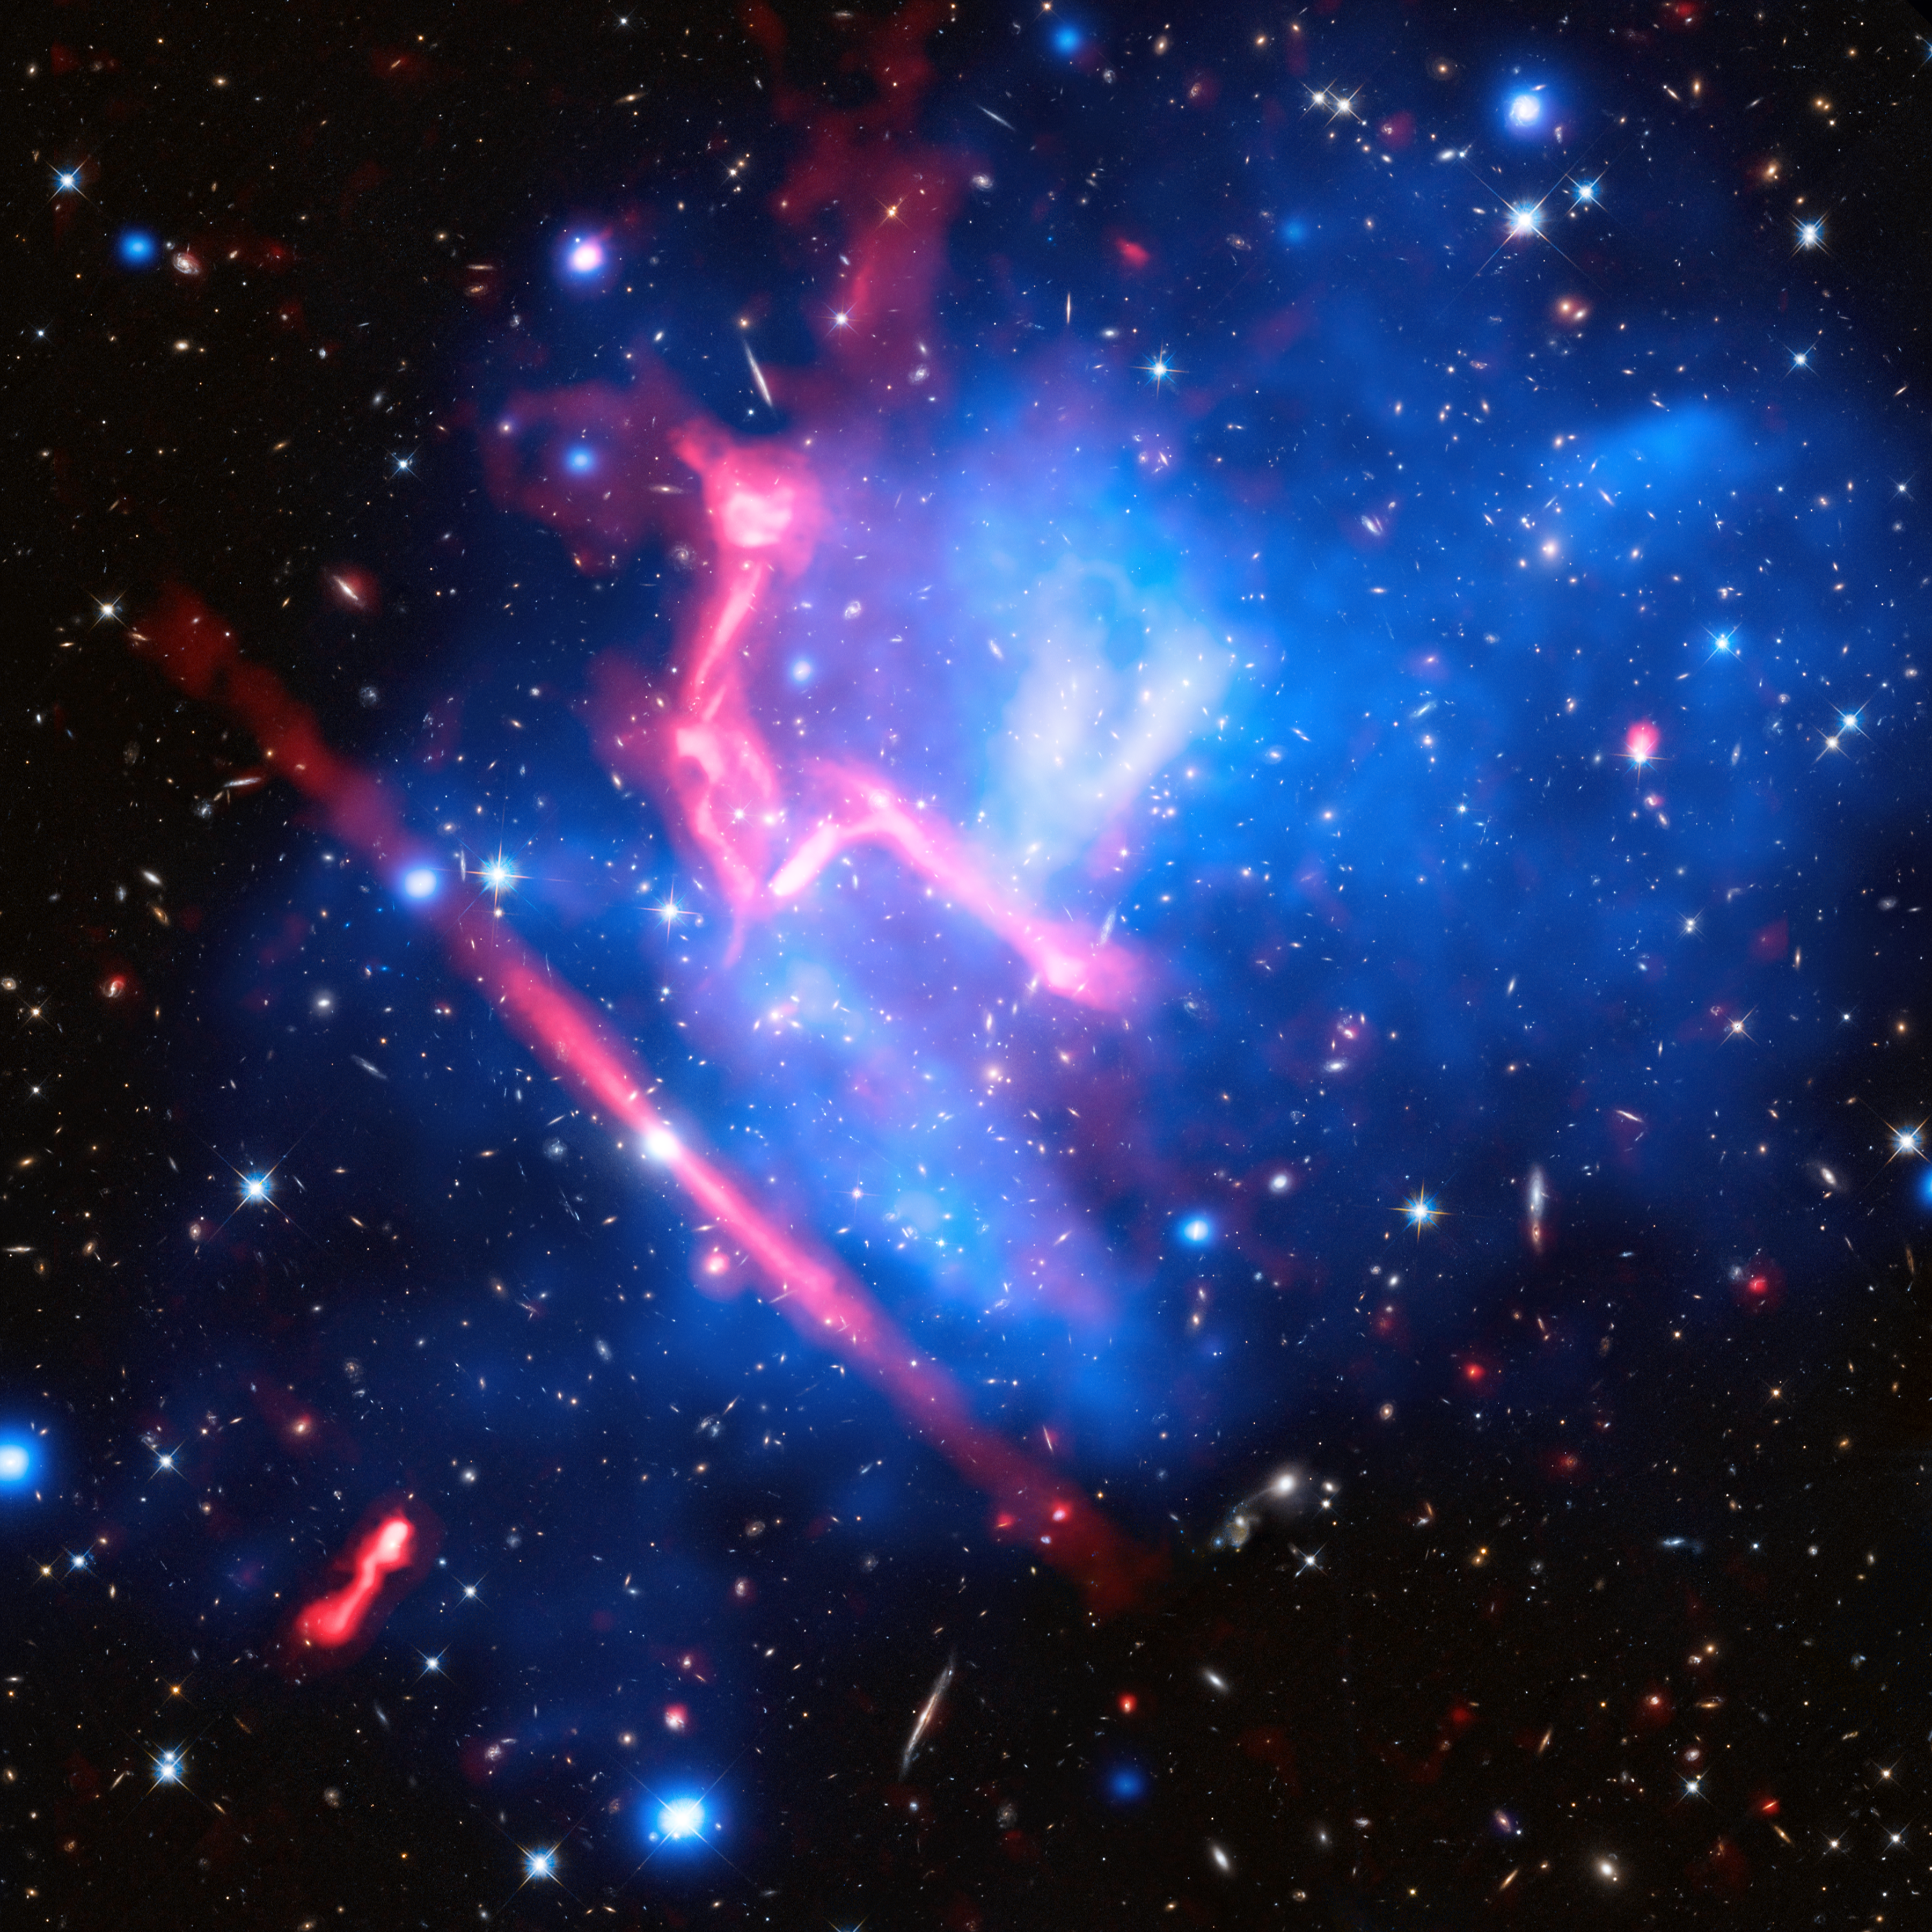

Disco lights from a galaxy cluster

In October of 2013 Hubble kicked off the Frontier Fields programme, a three-year series of observations aiming to produce the deepest ever views of the Universe. The project’s targets comprise six massive galaxy clusters, enormous collections of hundreds or even thousands of galaxies. These structures are the largest gravitationally-bound objects in the cosmos.

One of the Frontier Fields targets is shown in this new image: MACS J0717.5+3745, or MACS J0717 for short. MACS J0717 is located about 5.4 billion light-years away from Earth, in the constellation of Auriga (The Charioteer). It is one of the most complex galaxy clusters known; rather than being a single cluster, it is actually the result of four galaxy clusters colliding.

This image is a combination of observations from the NASA/ESA Hubble Space Telescope (showing the galaxies and stars), the NASA Chandra X-ray Observatory (diffuse emission in blue), and the NRAO Jansky Very Large Array (diffuse emission in pink). The Hubble data were collected as part of the Frontier Fields programme mentioned above.

Together, the three datasets produce a unique new view of MACS J0717. The Hubble data reveal galaxies both within the cluster and far behind it, and the Chandra observations show bright pockets of scorching gas — heated to millions of degrees. The data collected by the Jansky Very Large Array trace the radio emission within the cluster, enormous shock waves — similar to sonic booms — that were triggered by the violent merger.

For more information on Frontier Fields, see Hubblecast 90: The final frontier.

Credit: NASA, ESA, CXC, NRAO/AUI/NSF, STScI, and R. van Weeren (Harvard-Smithsonian Center for Astrophysics) Acknowledgment: NASA, ESA, and J. Lotz (STScI), and the HFF team